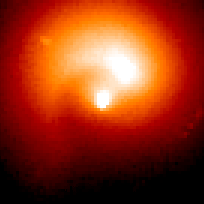

Comet Hale-Bopp

This is a series of Hubble Space Telescope observations of the region around the nucleus of Hale-Bopp, taken on eight different dates since September 1995. They chronicle changes in the evolution of the nucleus as it moves ever closer to, and is warmed by, the sun.

Credit: Harold Weaver (Johns Hopkins University) and NASA/ESA